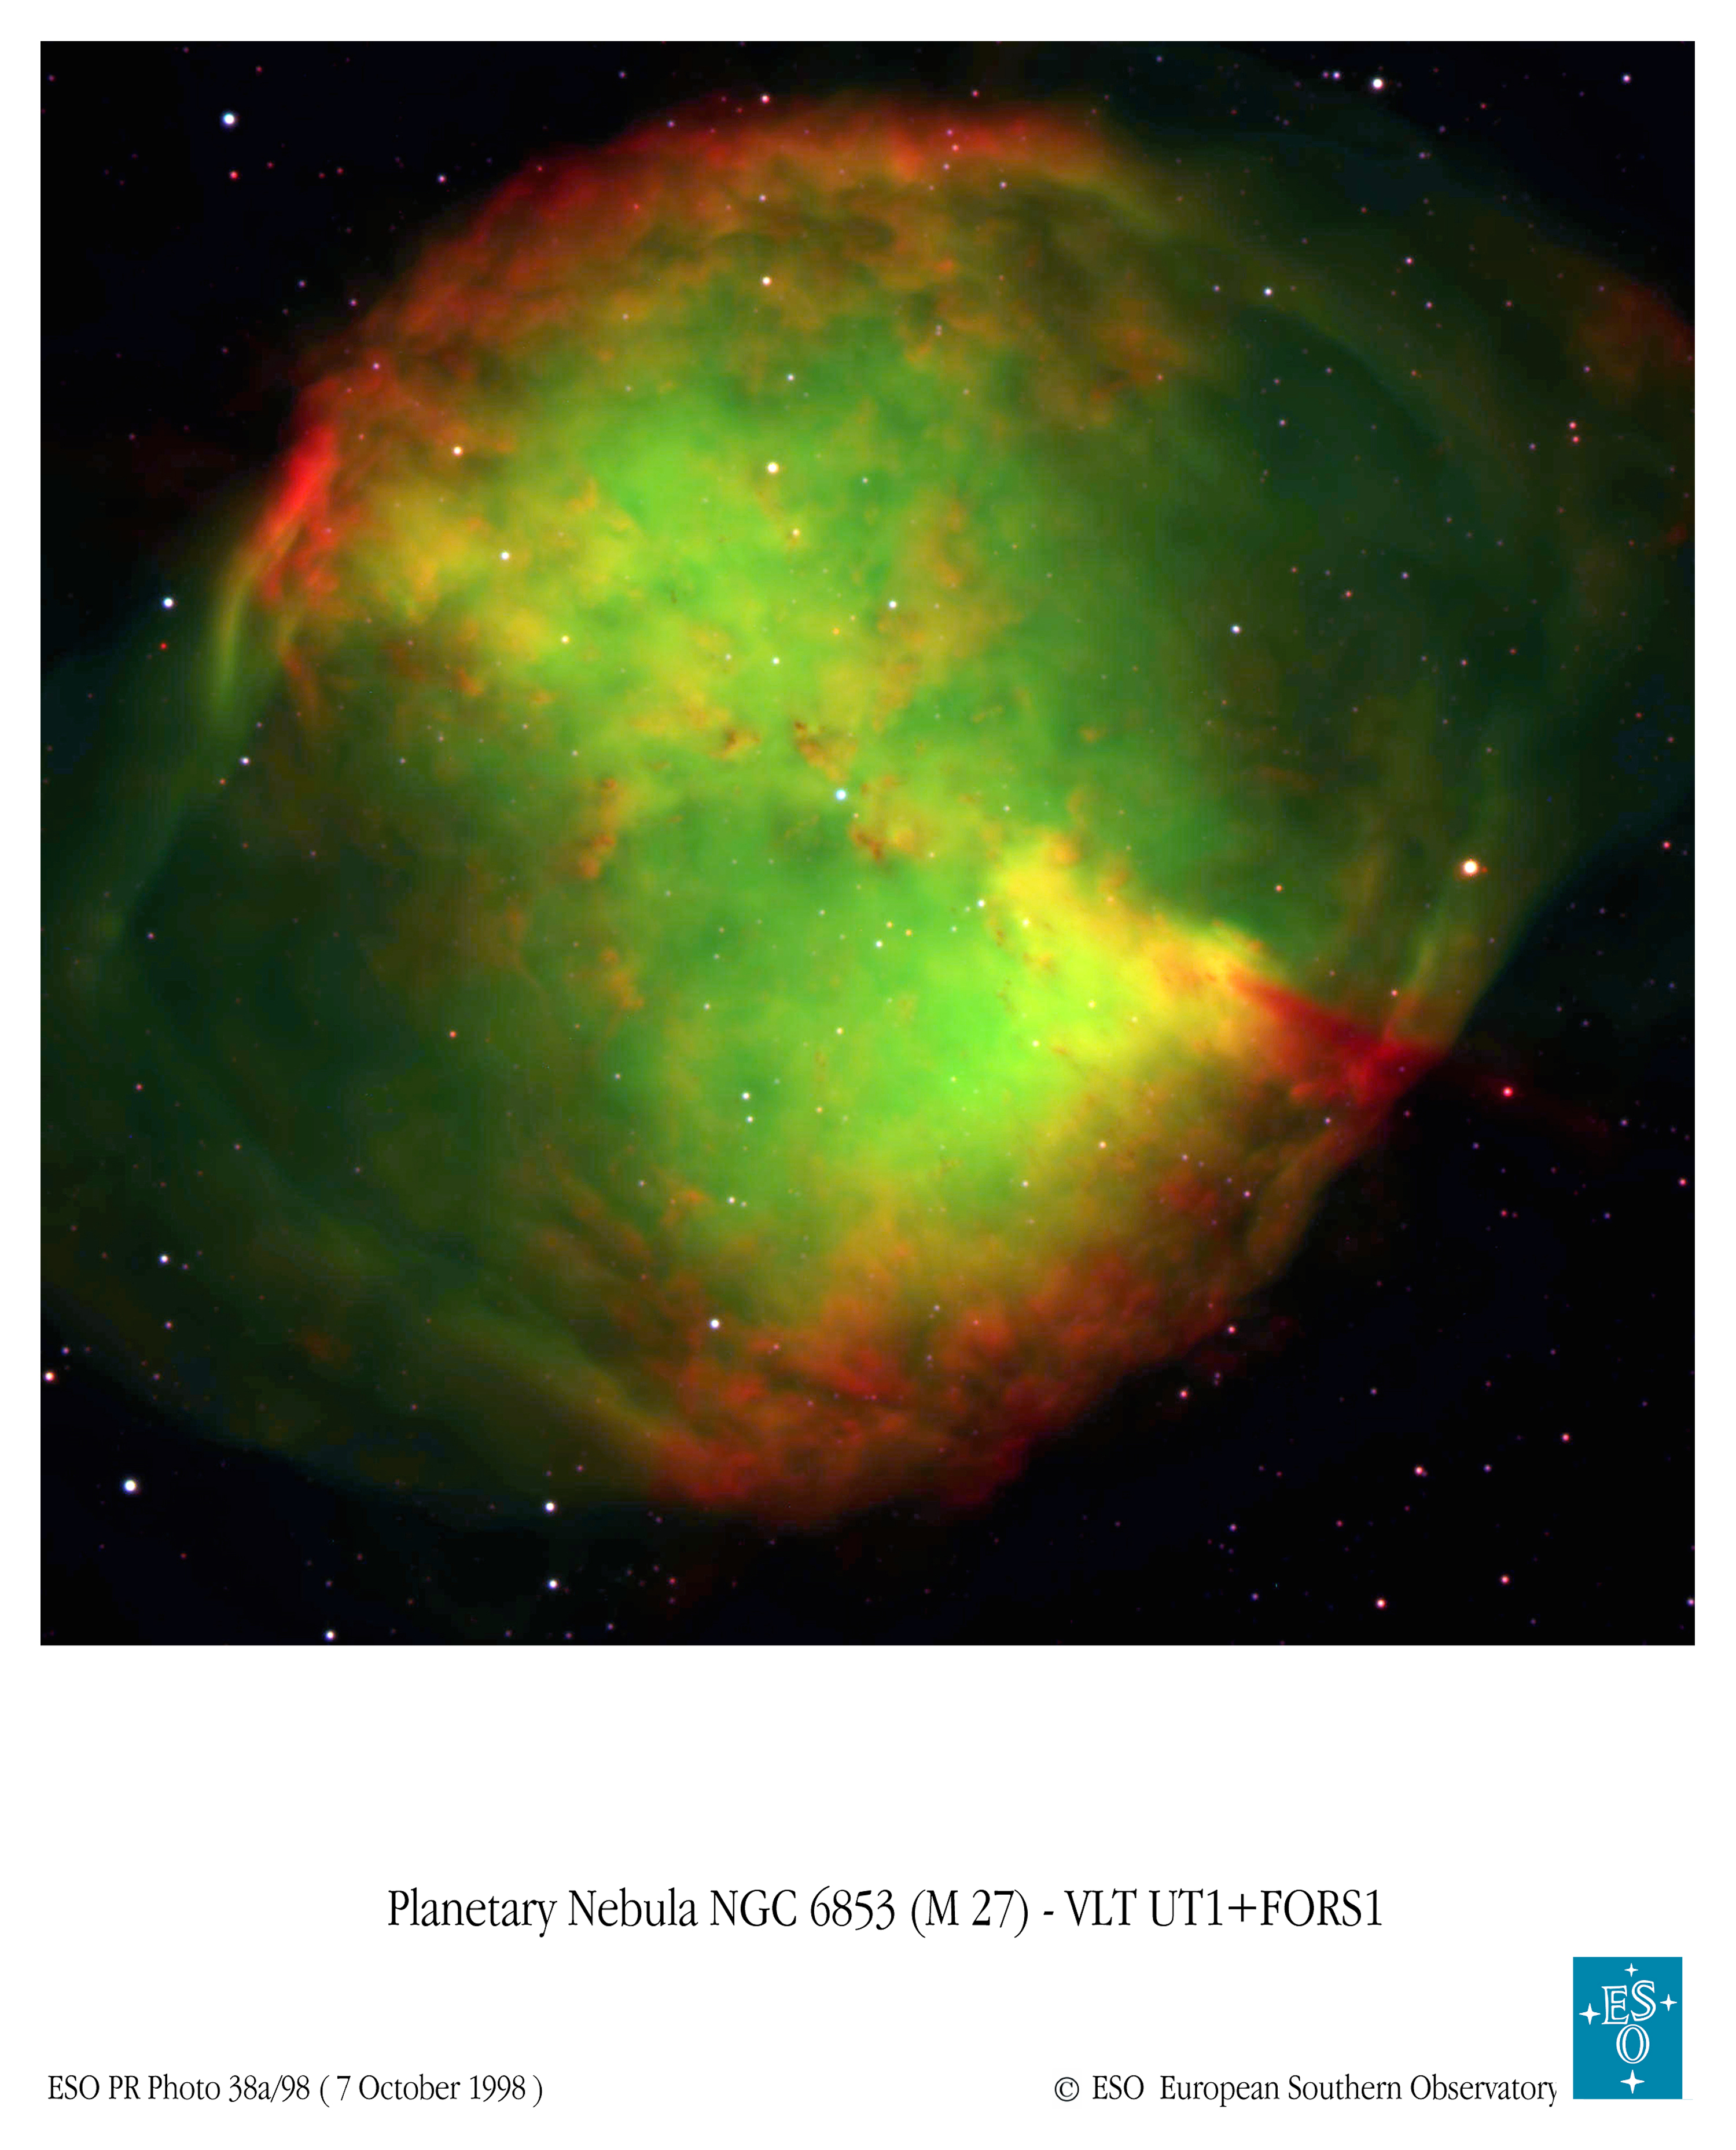

VLT Image of Dumbbell Nebula (ground-based image)

round-based image of Dumbbell taken with VLT 8.2mtelescope in H-alpha, [O III], and B filters. VLT Dumbbell Nebula Photo Page

Credit: European Southern Observatory